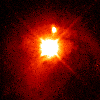

Quasar PKS 2349

In this image astronomers can thoroughly examine the quasar's nucleus.

Credit: John Bahcall (Institute for Advanced Study, Princeton) Mike Disney (University of Wales) and NASA/ESA